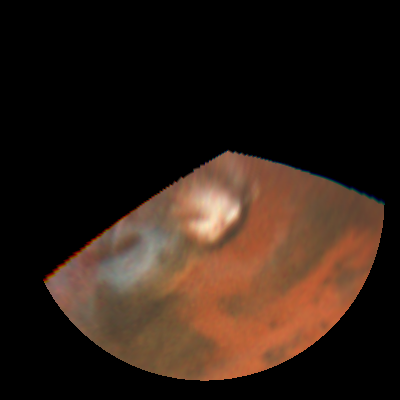

Rapid weather change observed on Mars

NASA/ESA Hubble Space Telescope images of Mars obtained on July 9, 1997.

Credit: Steve Lee (Univ. Colorado), Phil James (Univ. Toledo), and Todd Clancy (Space Science Inst.)